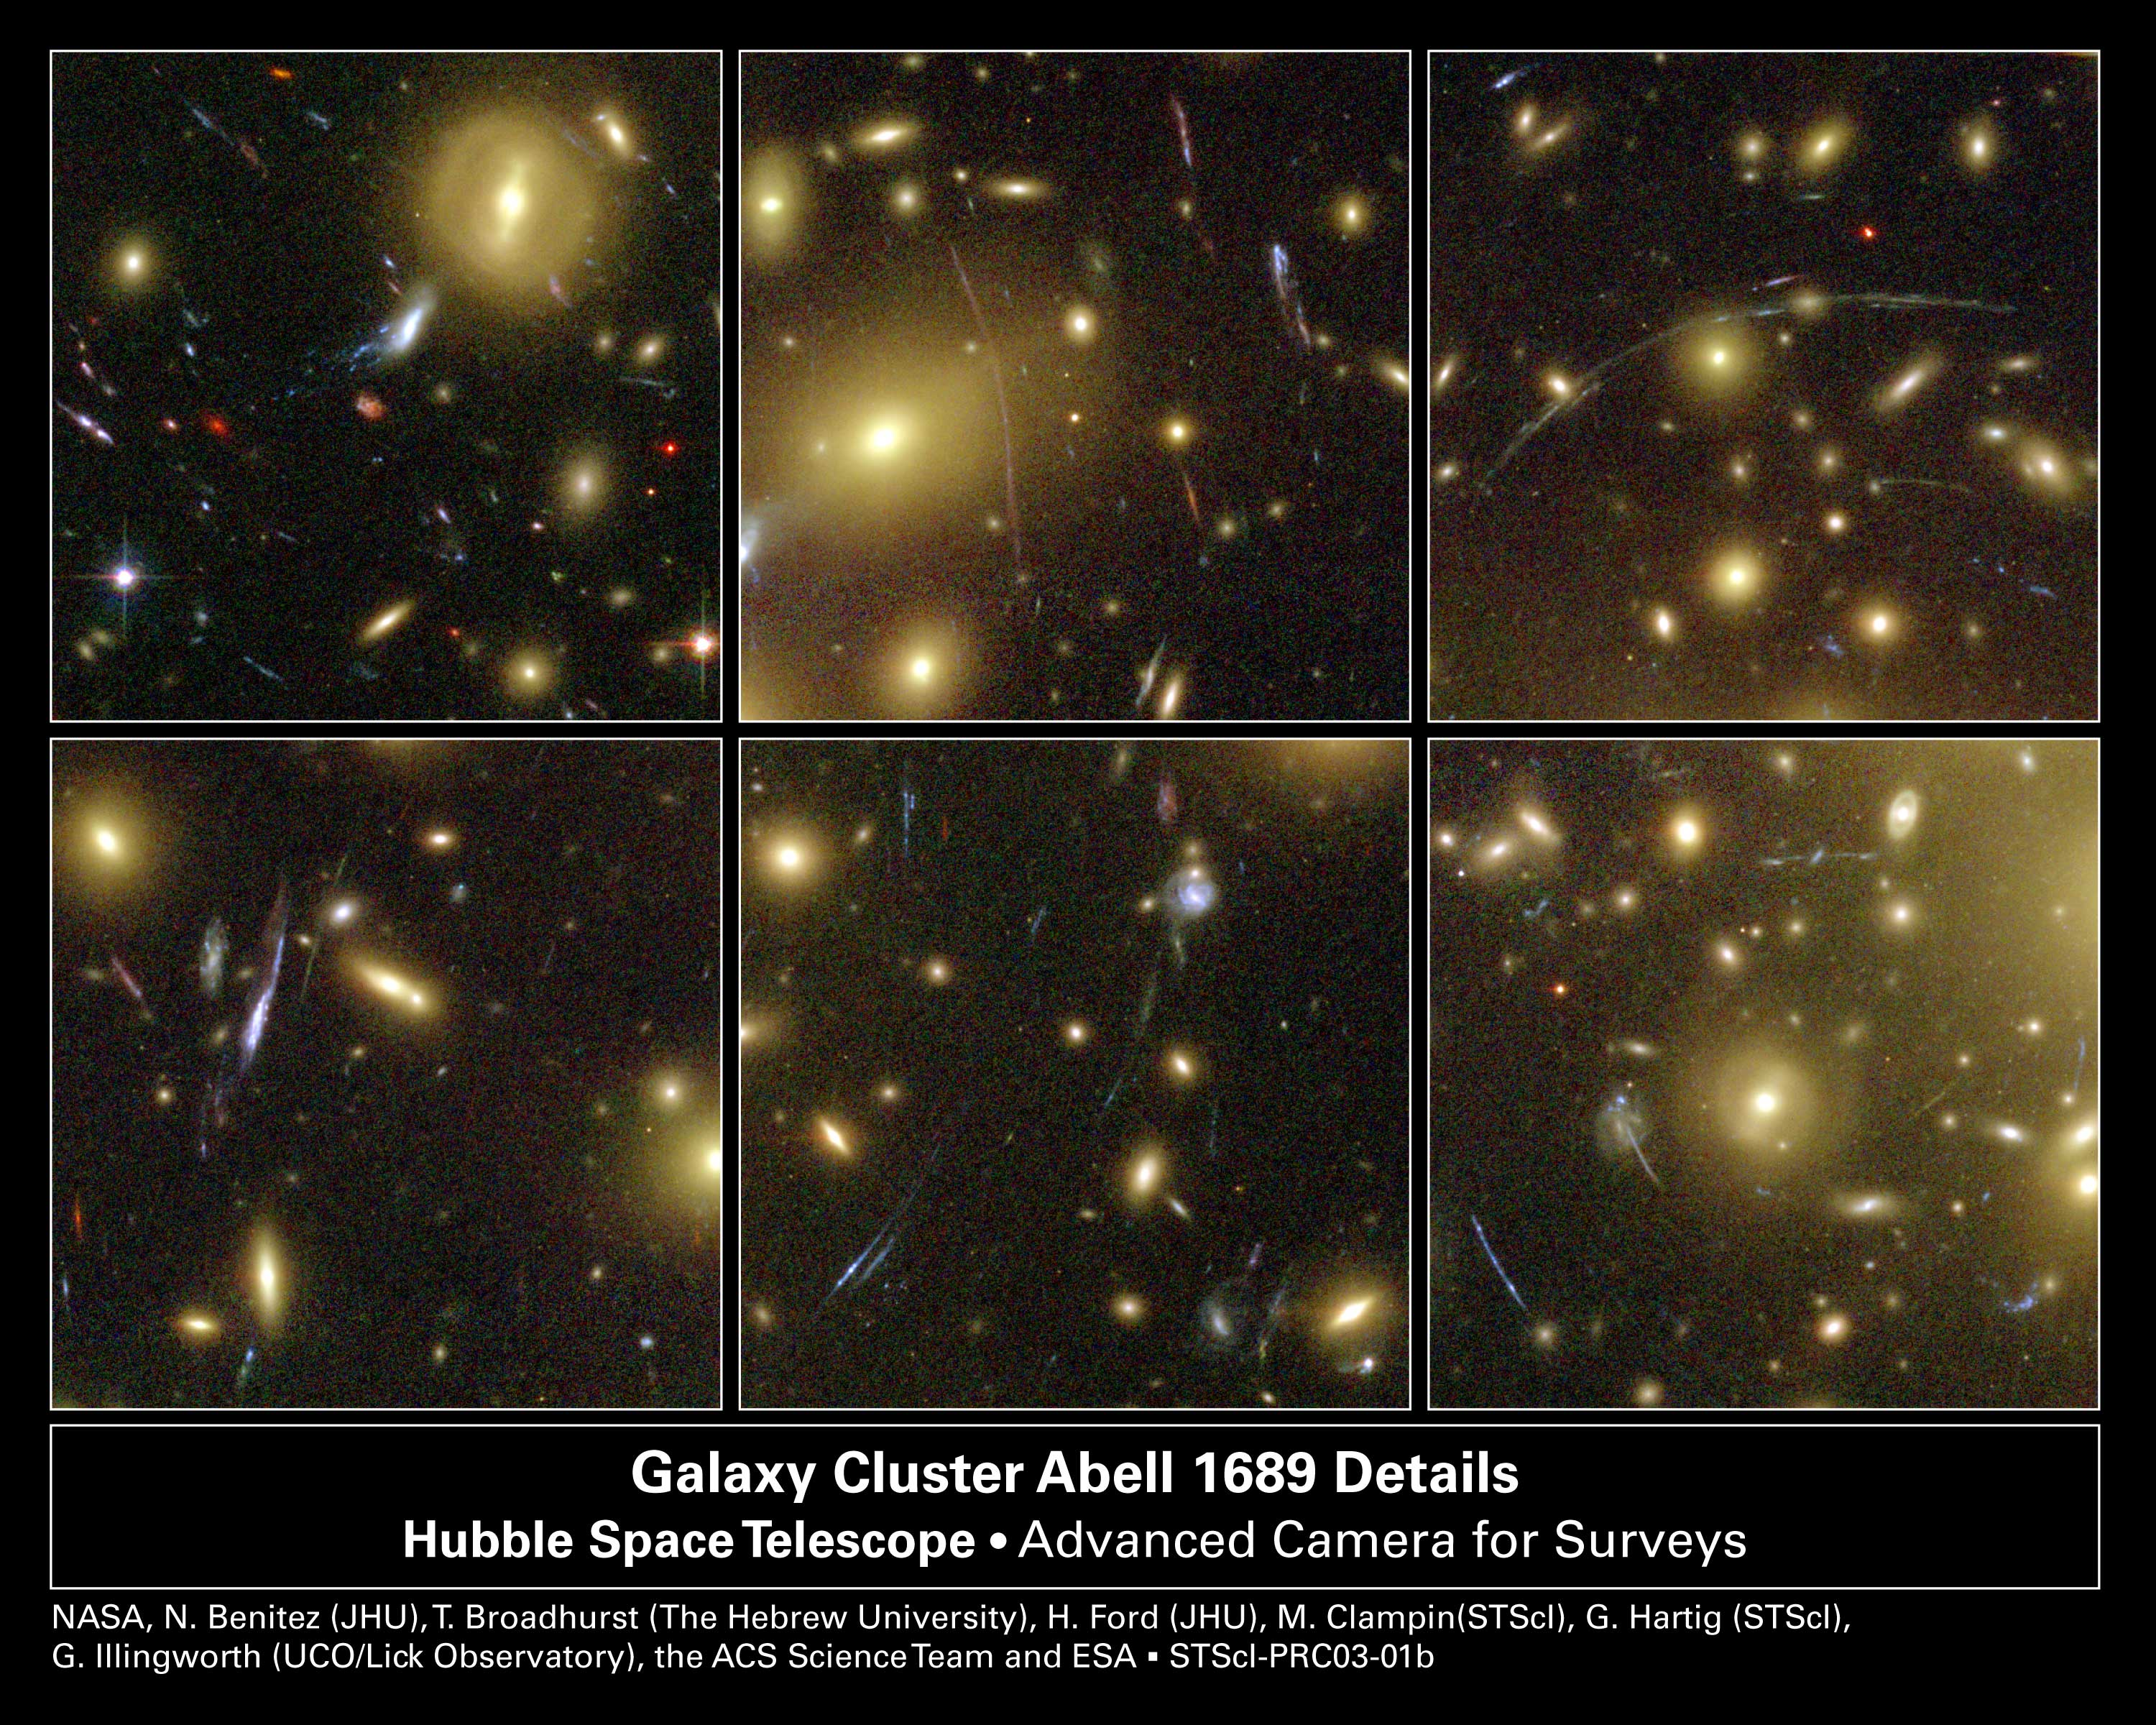

Hubble Looks Through Cosmic Zoom Lens (6 cropped images)

A selection of cropped images from a NASA/ESA Hubble Space Telescope Advanced Camera for Surveys view of one of the most massive galaxy clusters known, called Abell 1689. These close-ups show 'lensed' images of background galaxies that have been brightened and smeared by the gravitational bending of light by the foreground cluster.

The yellow-white objects are the cluster galaxies located 2.2 billion light-years away. The blue arcs are the distorted images of background galaxies located billions of light-years farther away than Abell 1689.

The distribution of both 'normal' and dark matter, and the alignment of the background galaxies determine the amount of distortion. In a perfectly aligned gravitational lens the background object would be smeared into an 'Einstein ring.' Instead, there are numerous ring sections or arcs corresponding to individual galaxies.

Credit: NASA, N. Benitez (JHU), T. Broadhurst (Racah Institute of Physics/The Hebrew University), H. Ford (JHU), M. Clampin (STScI), G. Hartig (STScI), G. Illingworth (UCO/Lick Observatory), the ACS Science Team and ESA